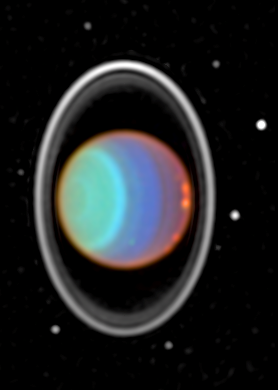

Hubble Tracks Clouds on Uranus

At visible and near-infrared light, sunlight is reflected from hazes and clouds in the atmosphere of Uranus. However, at near-infrared light, absorption by gases in the Uranian atmosphere limits the view to different altitudes, causing intense contrasts and colors.

Credit: Erich Karkoschka (University of Arizona), and NASA/ESA